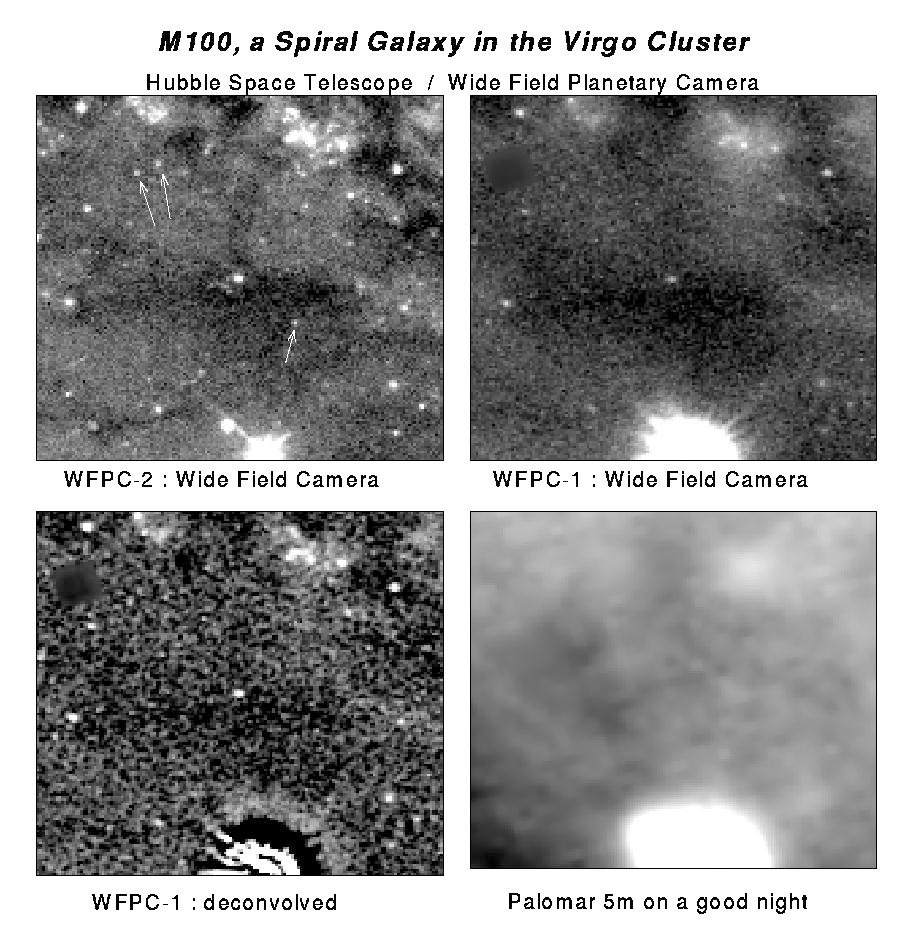

Galaxy M100 resolution comparison

This sequence of pictures shows successive steps in optical improvement from ground based telescopes to the newly improved Hubble Space Telescope and demonstrates the unique capability of the repaired HST. HST offers superb resolution, which allows astronomers to distinguish individual afar. in other galaxies. The resolution also allows very faint stars to be seen. This set of pictures demonstrates that the repaired HST can see stars which could never before be detected.

[upper left]
An outer region in the galaxy M100 as imaged by Hubble Space Telescope's second generation Wide Field/Planetary Camera (WFPC-2). The WFPC-2 incorporates modified optics that correct for the aberration of the primary mirror on the HST. While this image is not as visually spectacular as the image of the core of the galaxy, if demonstrates one of the moat important improvements in the capability of the telescope achieved during the HST servicing mission- the ability to detect and measure the light from individual faint stare in distant galaxies. Note in particular the star indicated by the arrows, which have the approximate brightness expected for Cepheid variables in M100. While these specific stars may not be Cepheids, repeated measurements of hundreds of stars of similar brightness spread throughout the galaxy' are expected to turn up several dozens of Cepheids. By accurately measuring the brightness of these "standard candles," astronomers will use the WFPC-2 to determine an accurate distance to M100. When combined with similar measurements for other galaxies, this distance will provide a crucial link in the chain that astronomers use to determine the expansion rate, age, and size of the universe.

Credit: NASA/ESA, STScI